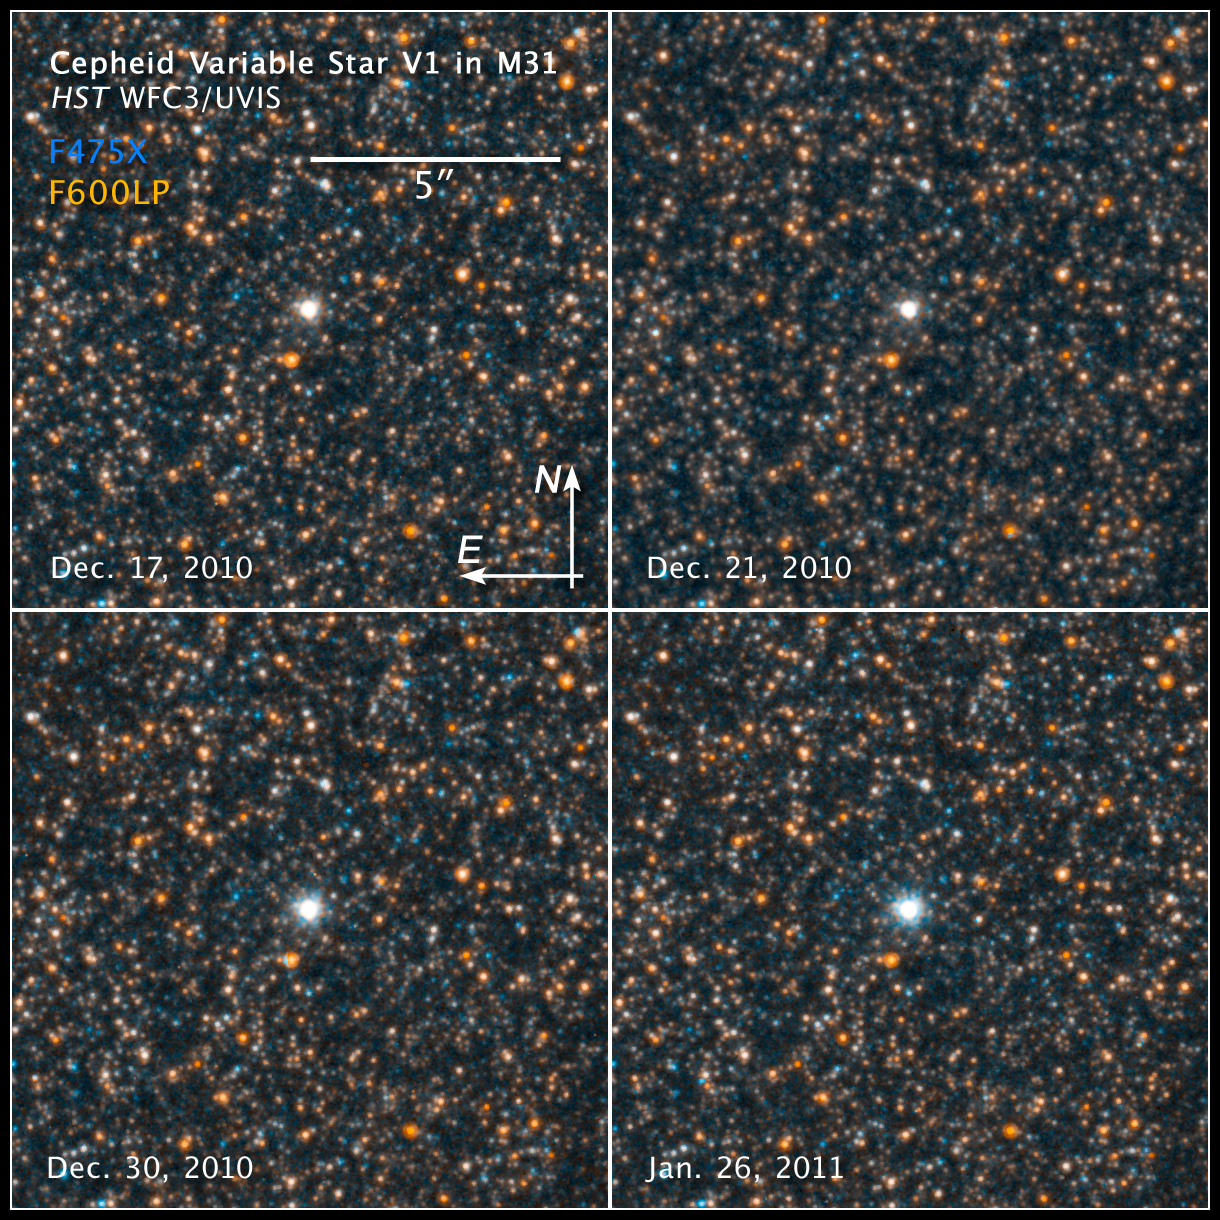

Compass and scale image of cepheid variable V1 in M31

Compass and scale image of cepheid variable V1 in M31.

Credit: NASA, ESA and the Hubble Heritage Team (STScI/AURA)